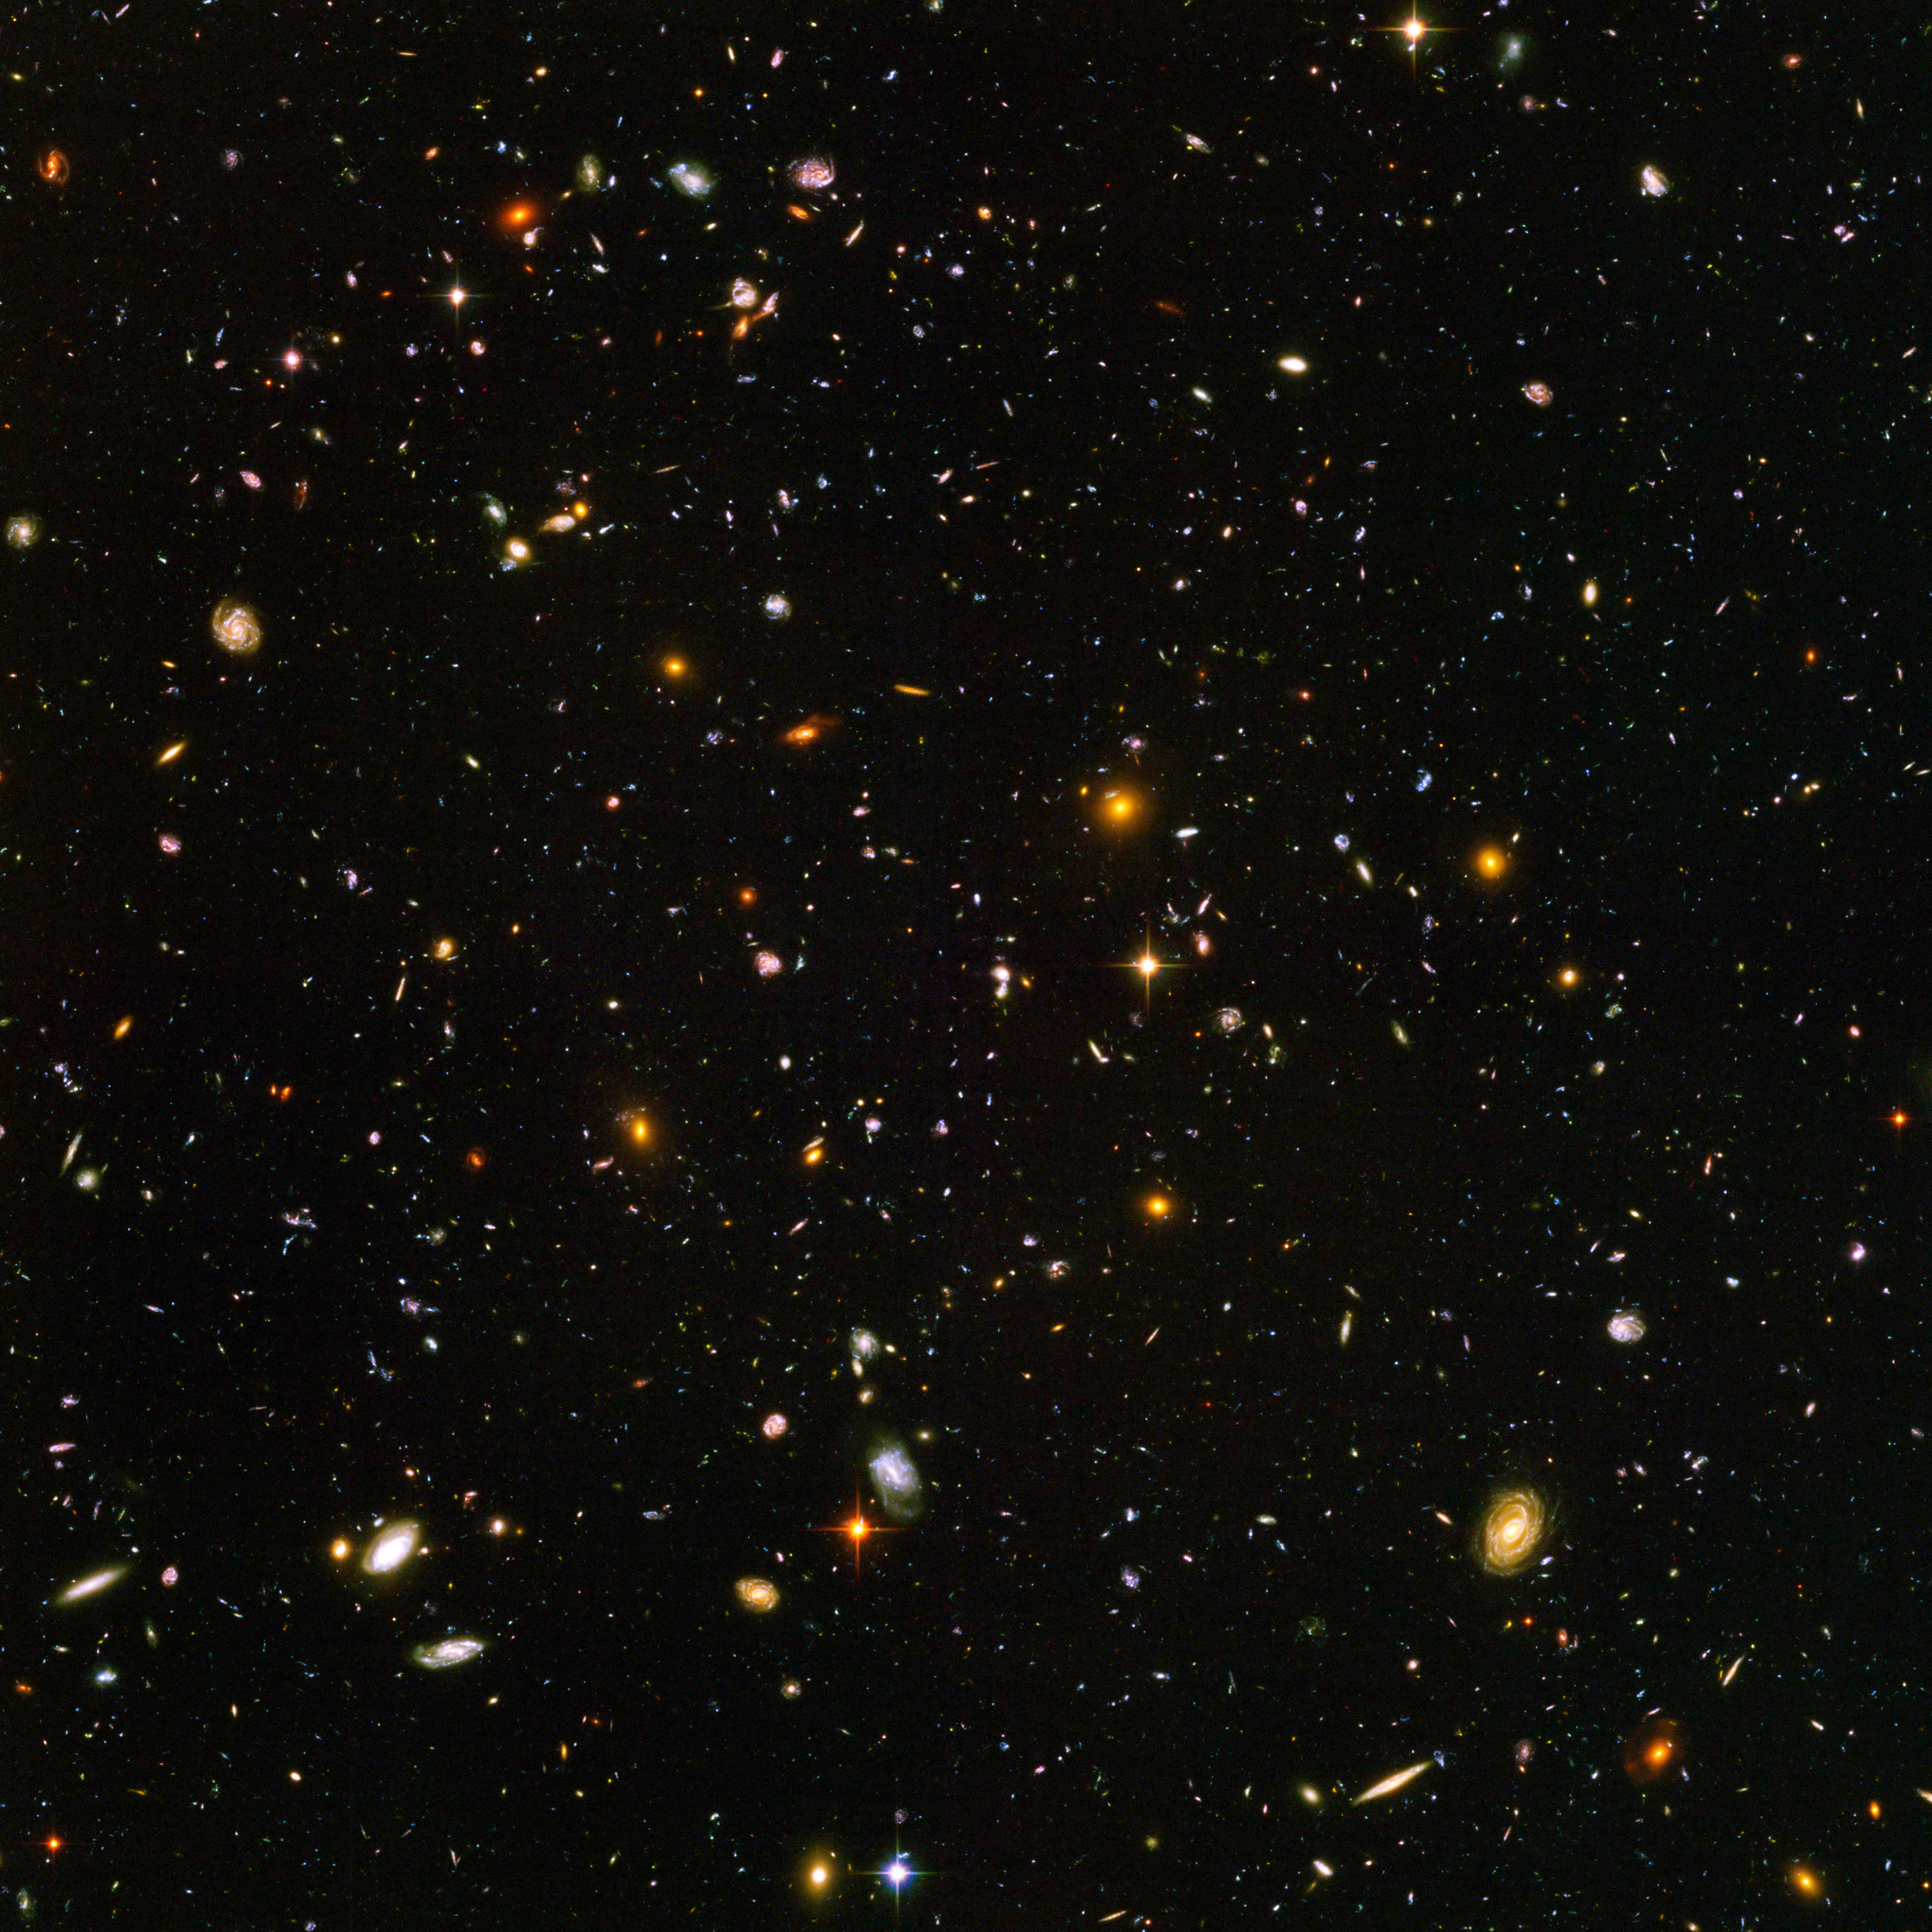

Spitzer and Hubble team up to find "Big Baby" galaxy in the newborn Universe [ACS image]

This image demonstrates how data from two space observatories, the Spitzer and Hubble Space Telescopes, are used to identify one of the most distant galaxies ever seen. This galaxy is unusually massive for its youthful age of 800 million years. (After the Big Bang, the Milky Way by comparison, is approximately 13 billion years old.)

The galaxy, named HUDF-JD2, was pinpointed among approximately 10,000 others in a small area of sky called the Hubble Ultra Deep Field (HUDF). This is the deepest images of the universe ever made at optical and near-infrared wavelengths.

Credit: NASA, ESA, B. Mobasher ( Space Telescope Science Institute and the European Space Agency)